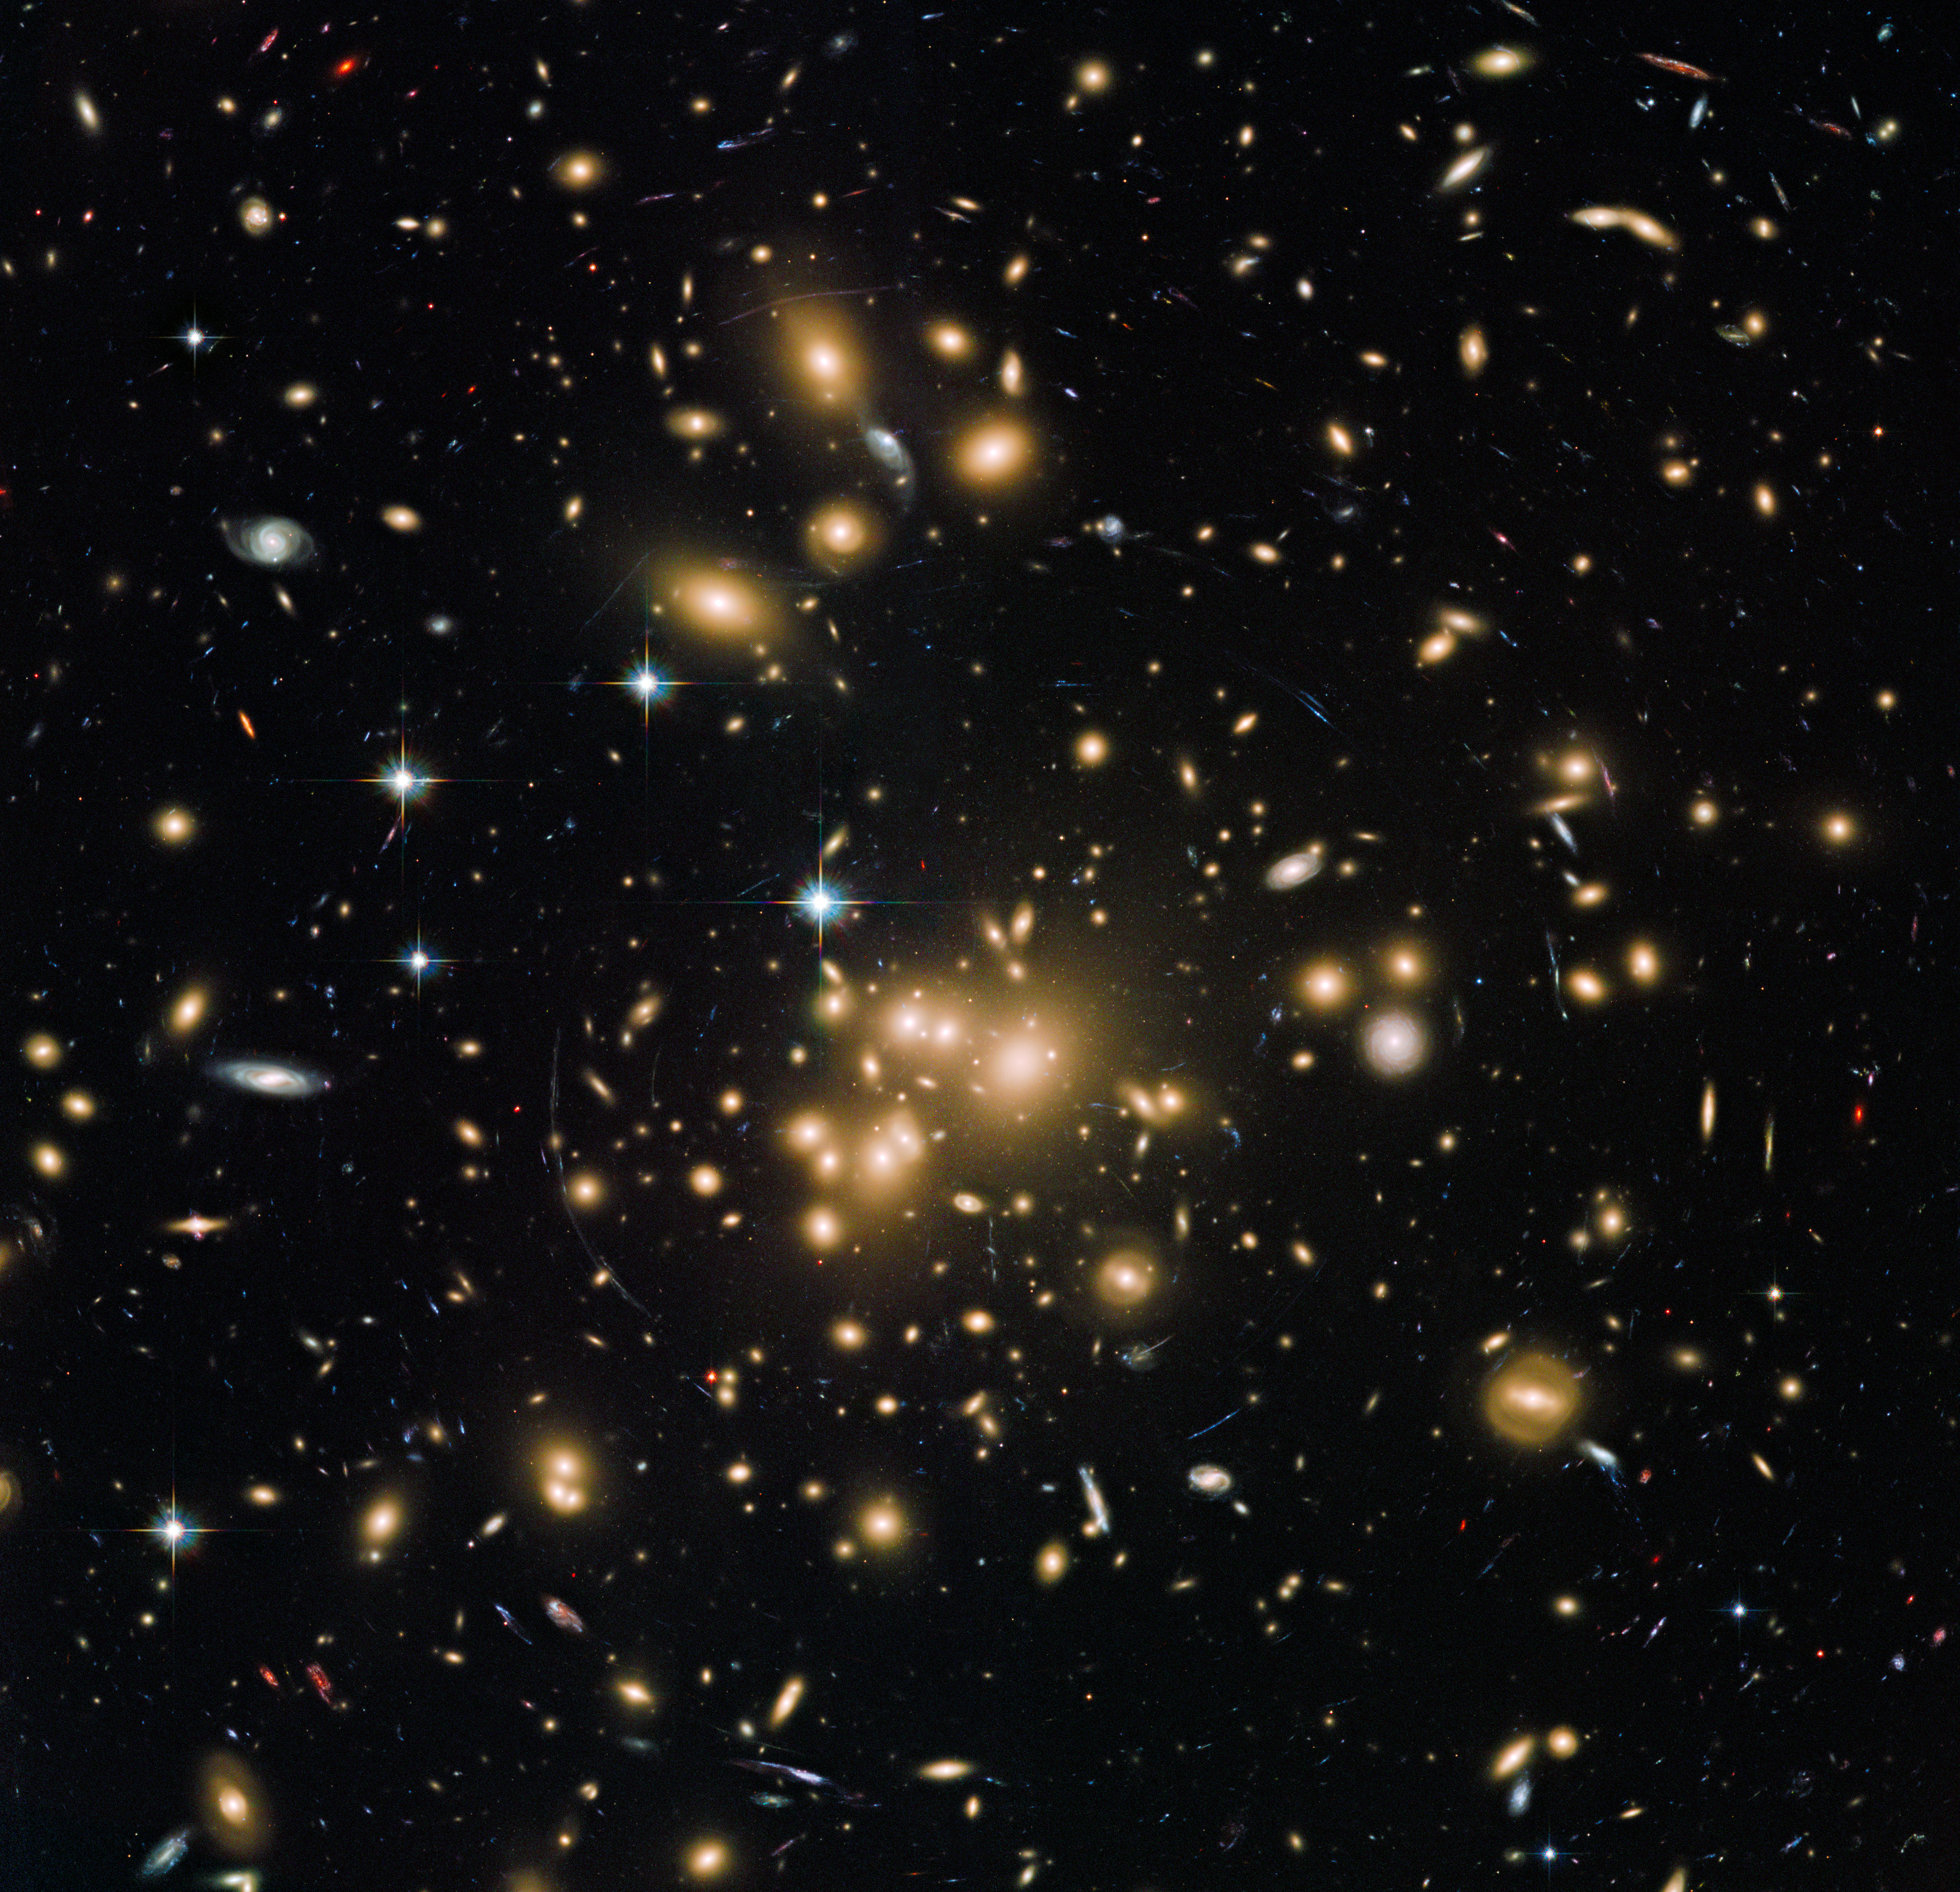

New Hubble view of galaxy cluster Abell 1689

This new Hubble image shows galaxy cluster Abell 1689. It combines both visible and infrared data from Hubble’s Advanced Camera for Surveys (ACS) with a combined exposure time of over 34 hours (image on left over 13 hours, image on right over 20 hours) to reveal this patch of sky in greater and striking detail than in previous observations.

This image is peppered with glowing golden clumps, bright stars, and distant, ethereal spiral galaxies. Material from some of these galaxies is being stripped away, giving the impression that the galaxy is dripping, or bleeding, into the surrounding space. Also visible are a number of electric blue streaks, circling and arcing around the fuzzy galaxies in the centre.

These streaks are the telltale signs of a cosmic phenomenon known as gravitational lensing. Abell 1689 is so massive that it bends and warps the space around it, affecting how light from objects behind the cluster travels through space. These streaks are the distorted forms of galaxies that lie behind the cluster.

Credit: NASA, ESA, the Hubble Heritage Team (STScI/AURA), J. Blakeslee (NRC Herzberg Astrophysics Program, Dominion Astrophysical Observatory), and H. Ford (JHU)